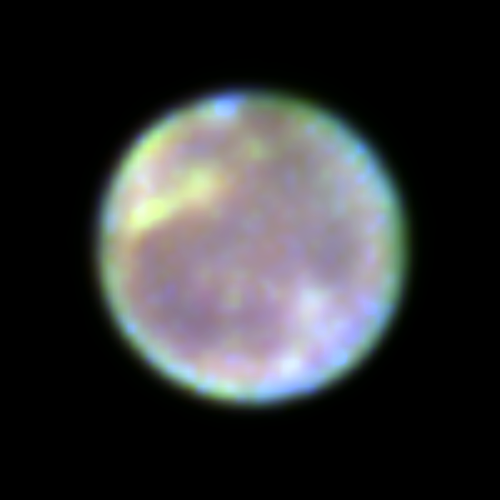

Hubble Finds Ozone Spectral "Fingerprint" on Ganymede

NASA's Hubbe Space Telescope found ozone's spectral "fingerprint" during observations of Ganymede made by Keith Noll and colleagues at the Space Telescope Science Institute in Baltimore, Maryland. These Hubble Faint Object Spectrograph results were presented at the American Astronomical Society's 27th Annual Meeting of the Division of Planetary Sciences in Kona, Hawaii.

Credit: STScI, NASA/ESA